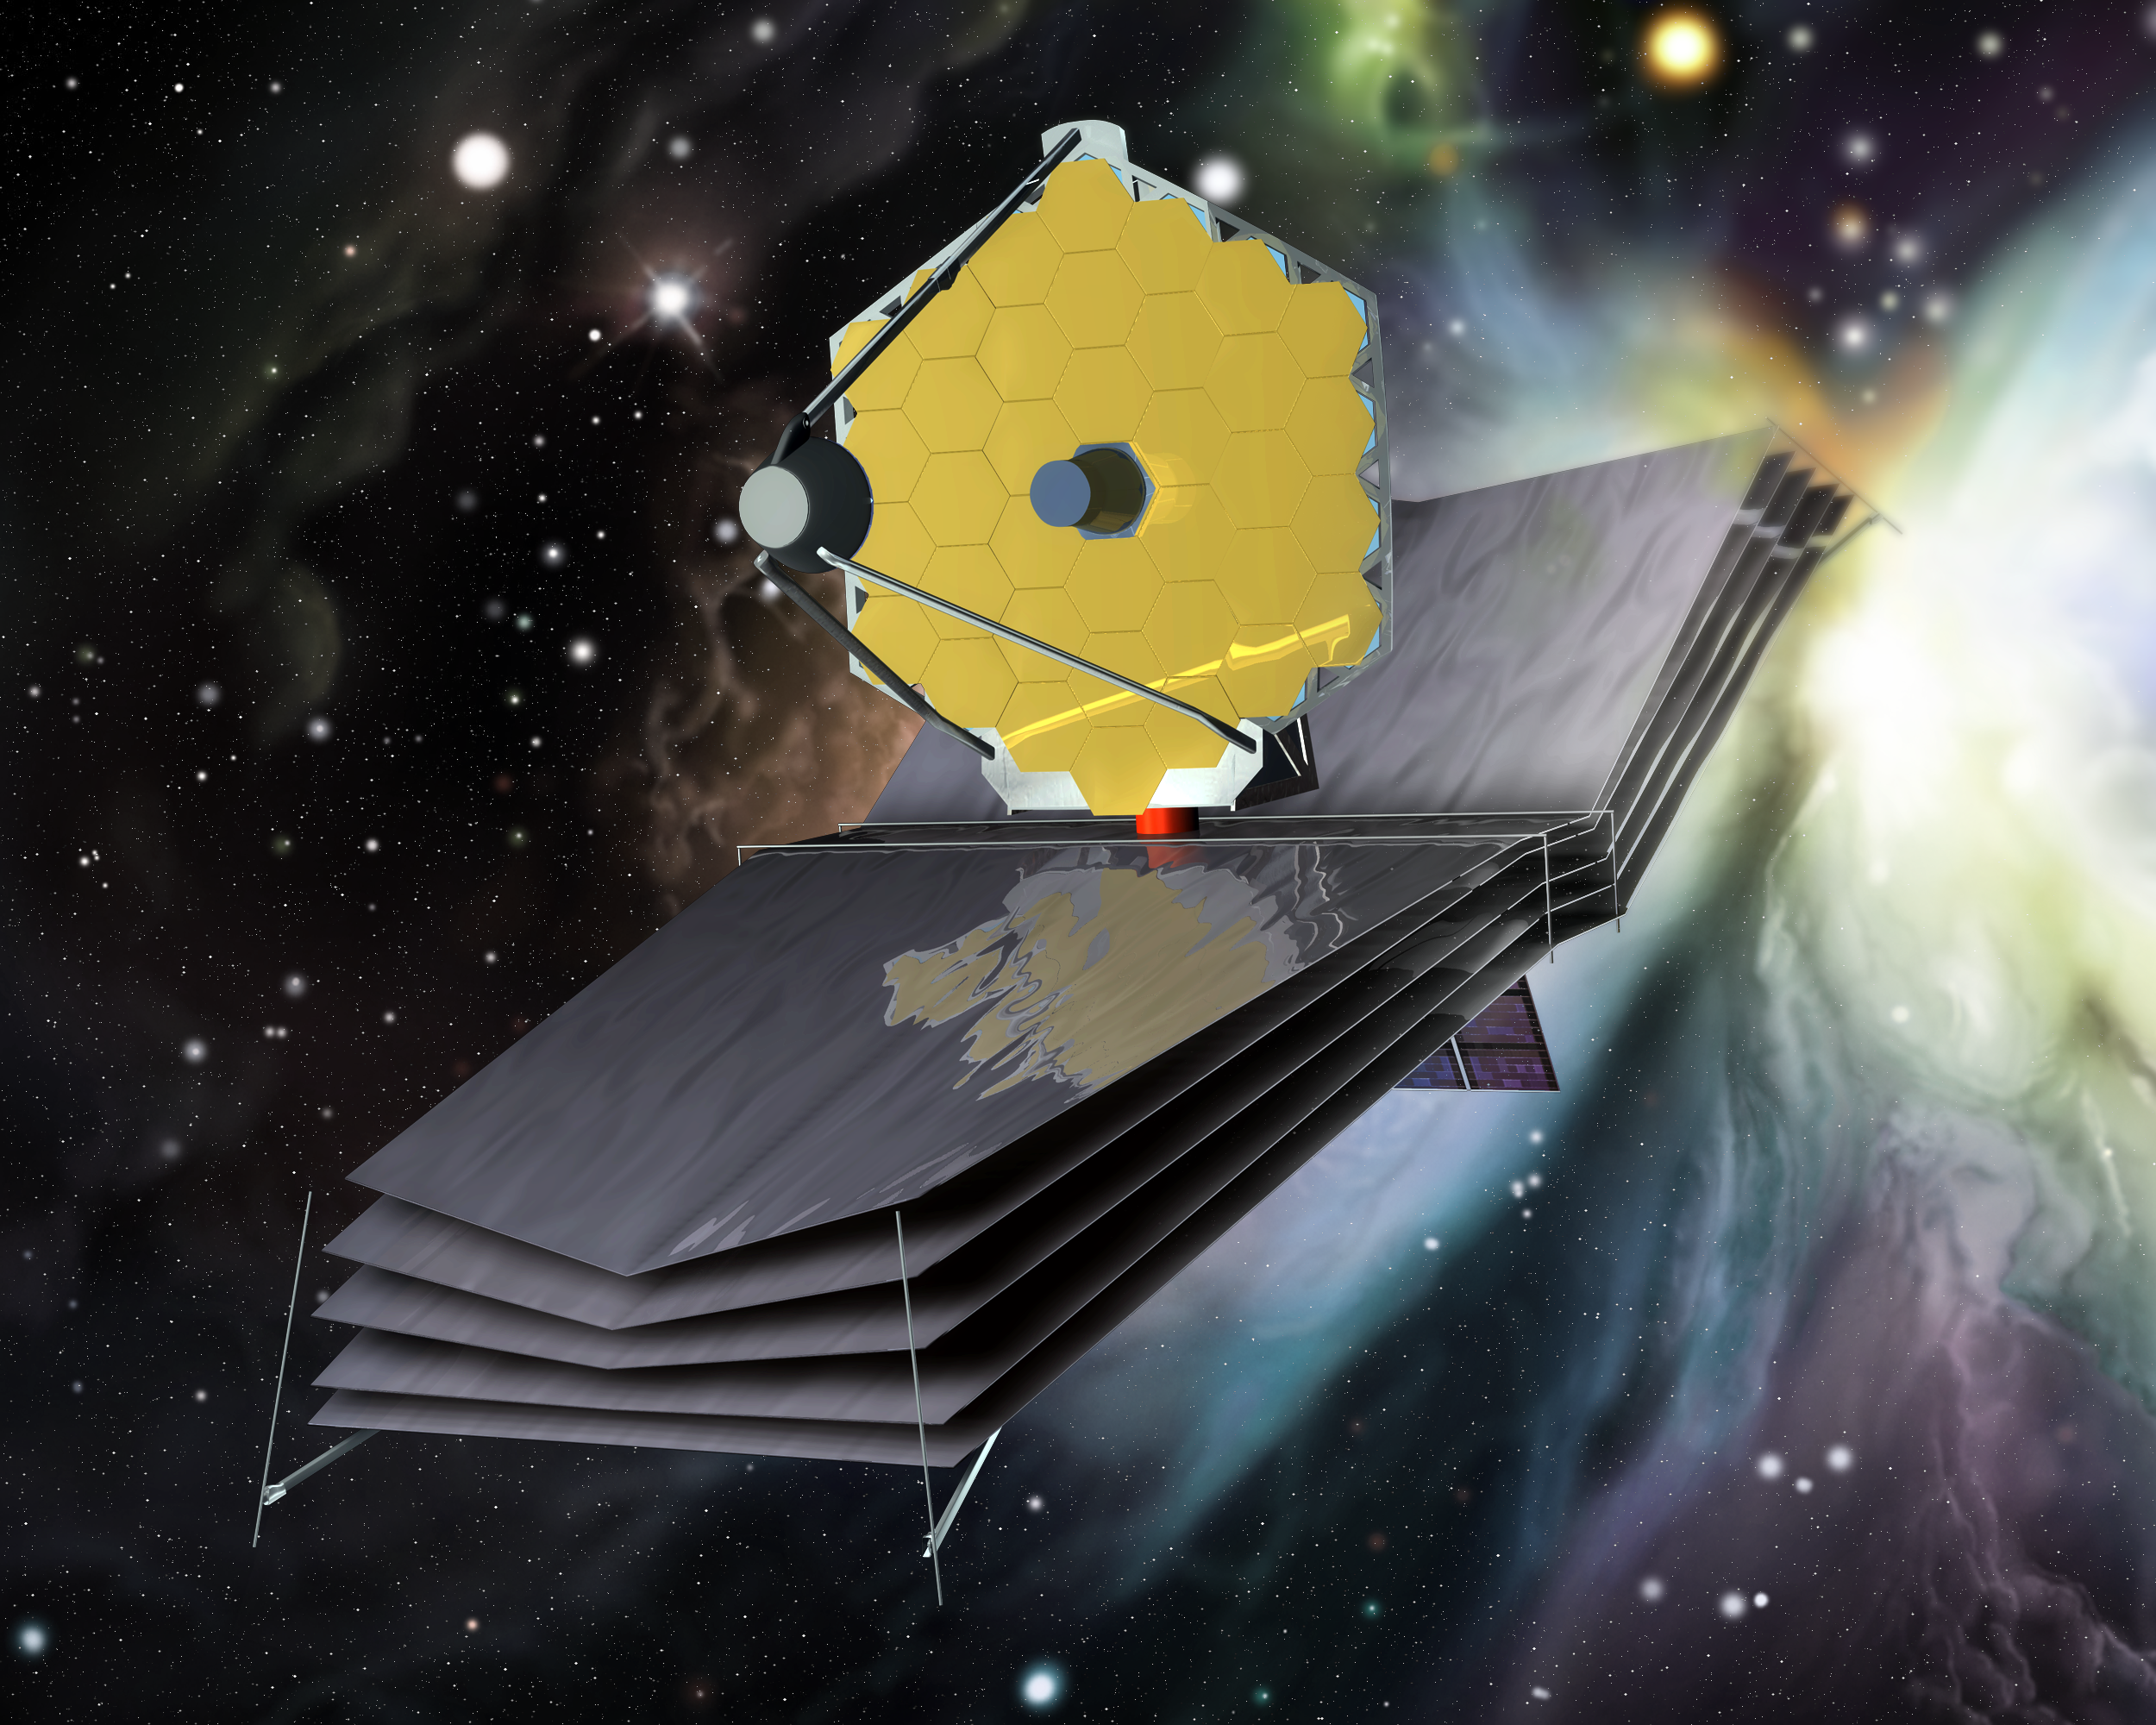

The James Webb Space Telescope (artist's impression)

3D rendering of the James Webb Space Telescope, showing the primary mirror and multi-layered sun shield.

Credit: ESA